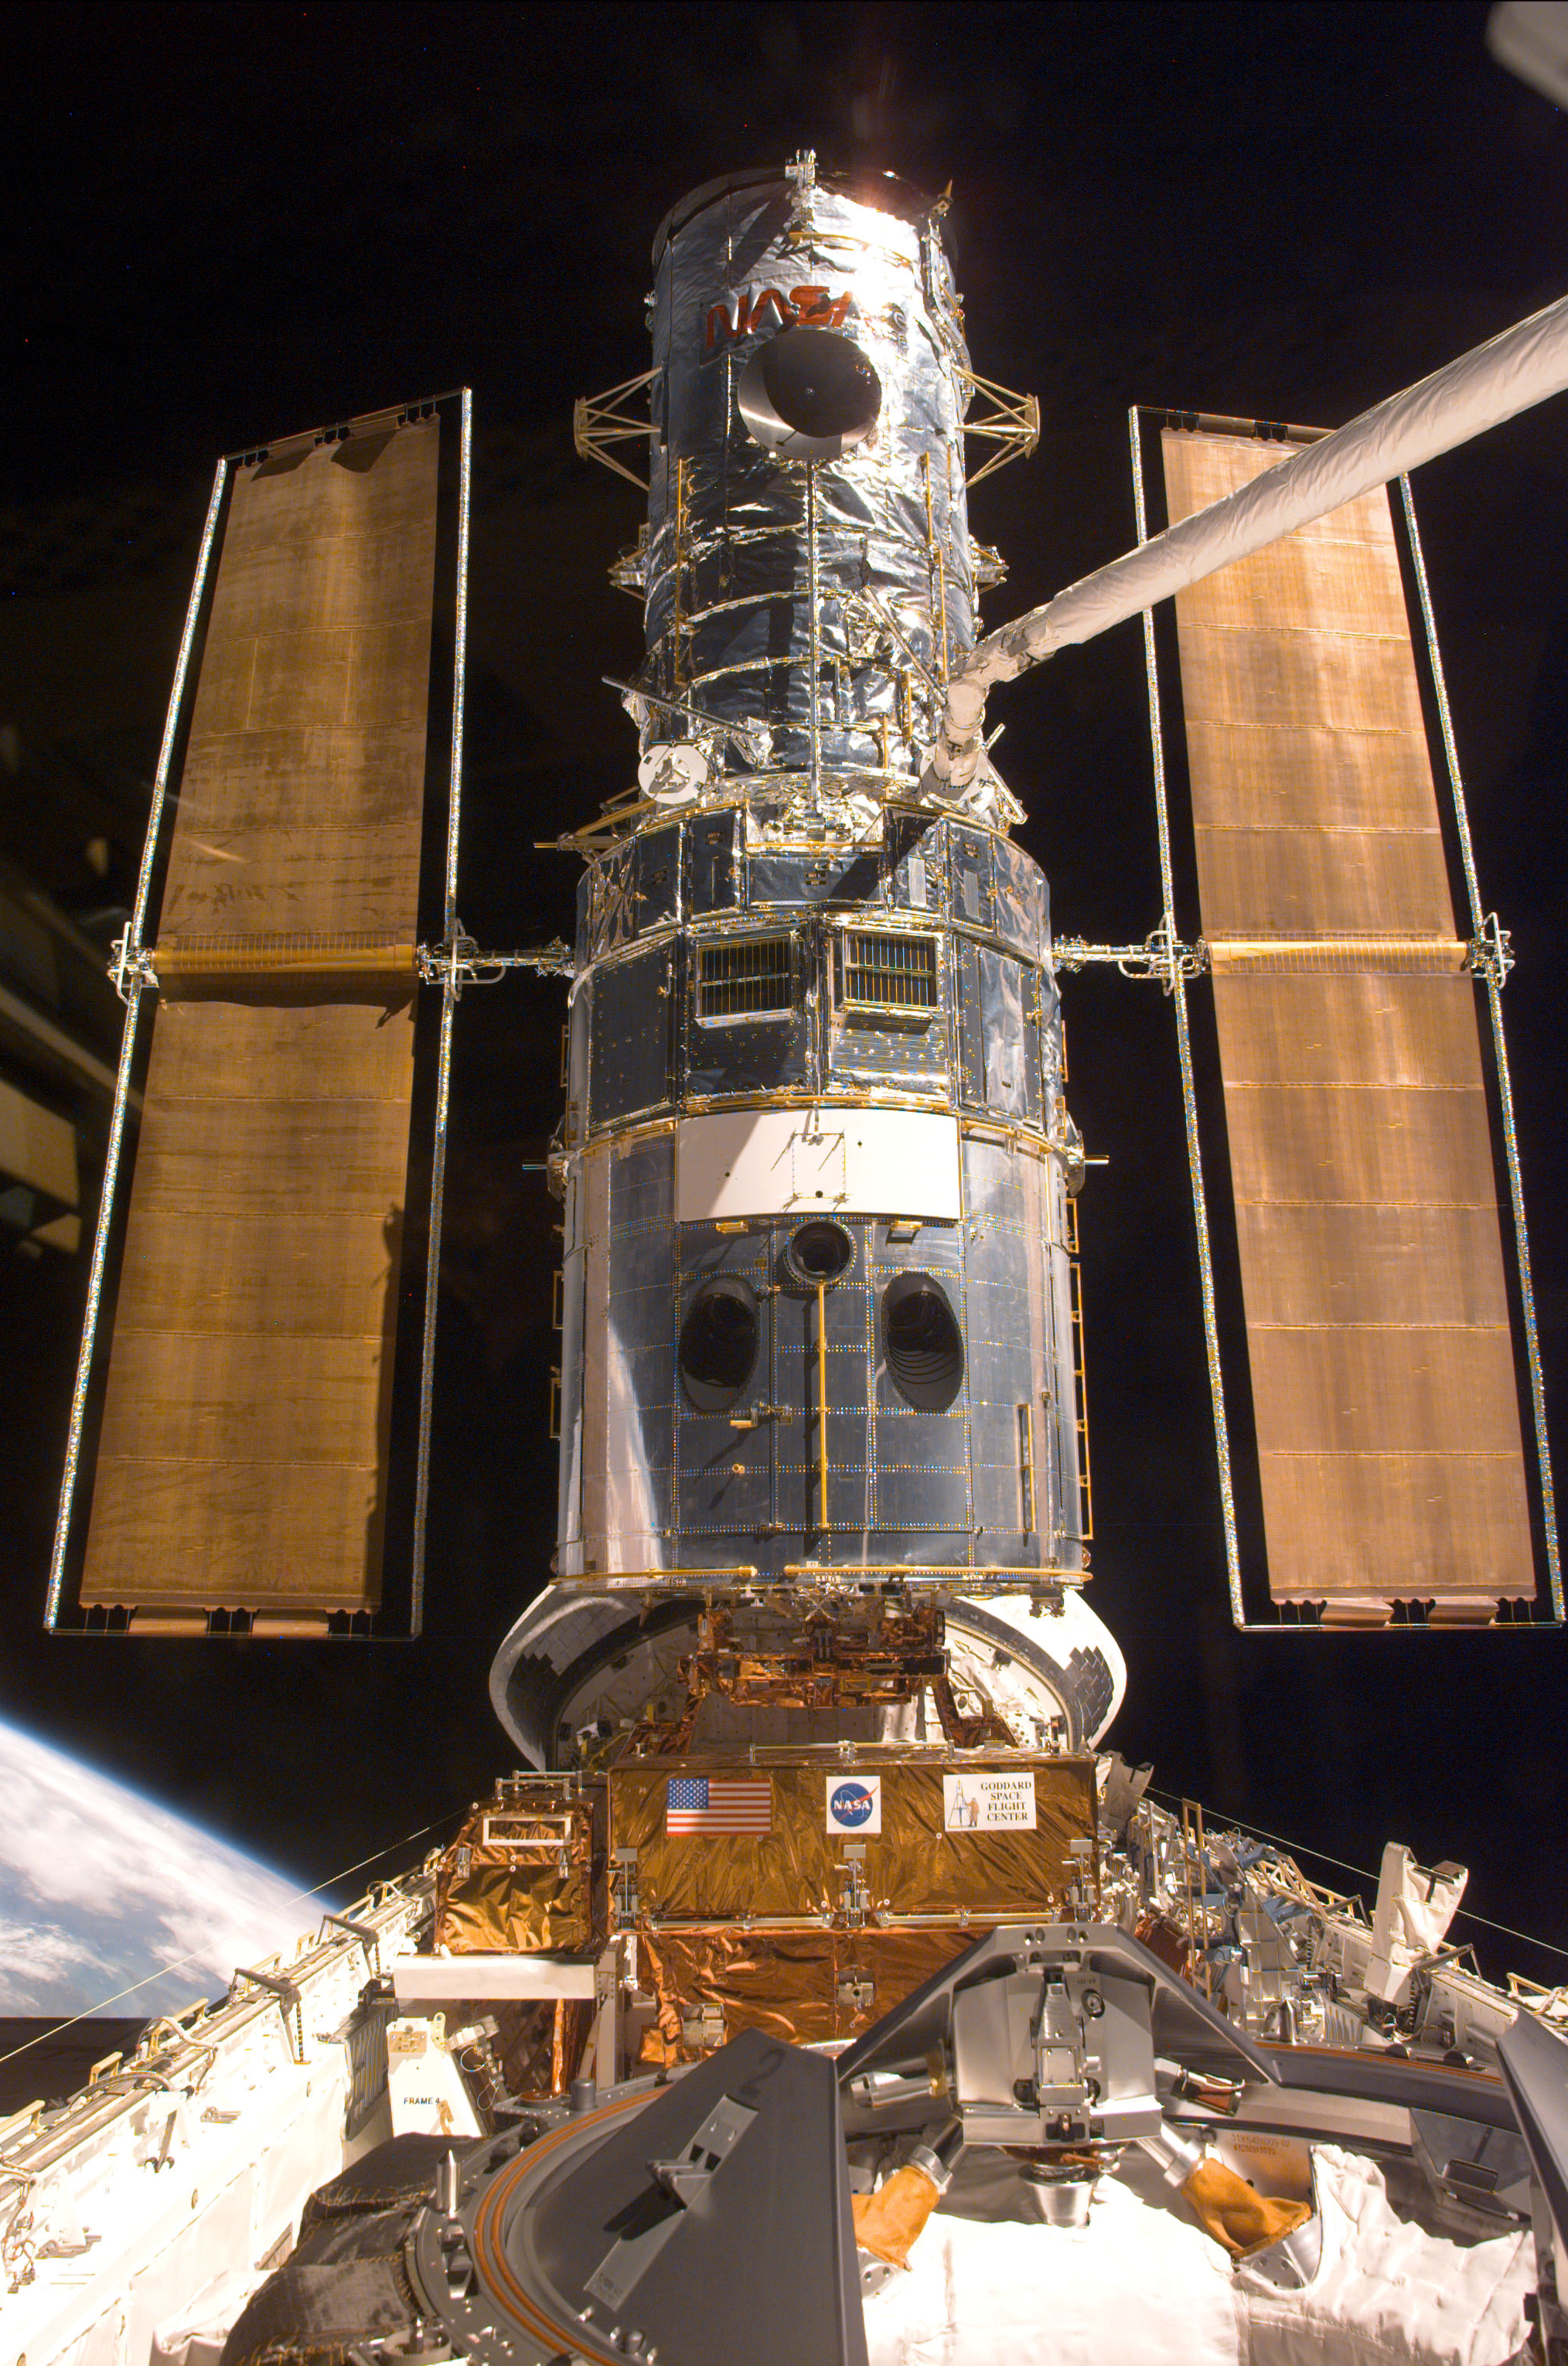

SM3A: Hubble captured in Discovery's Cargo Bay

This electronic still camera's view and others in this series showing the Hubble Space Telescope (HST) being berthed in Discovery's bay were recorded during and soon after capture.

Credit: NASA/ESA